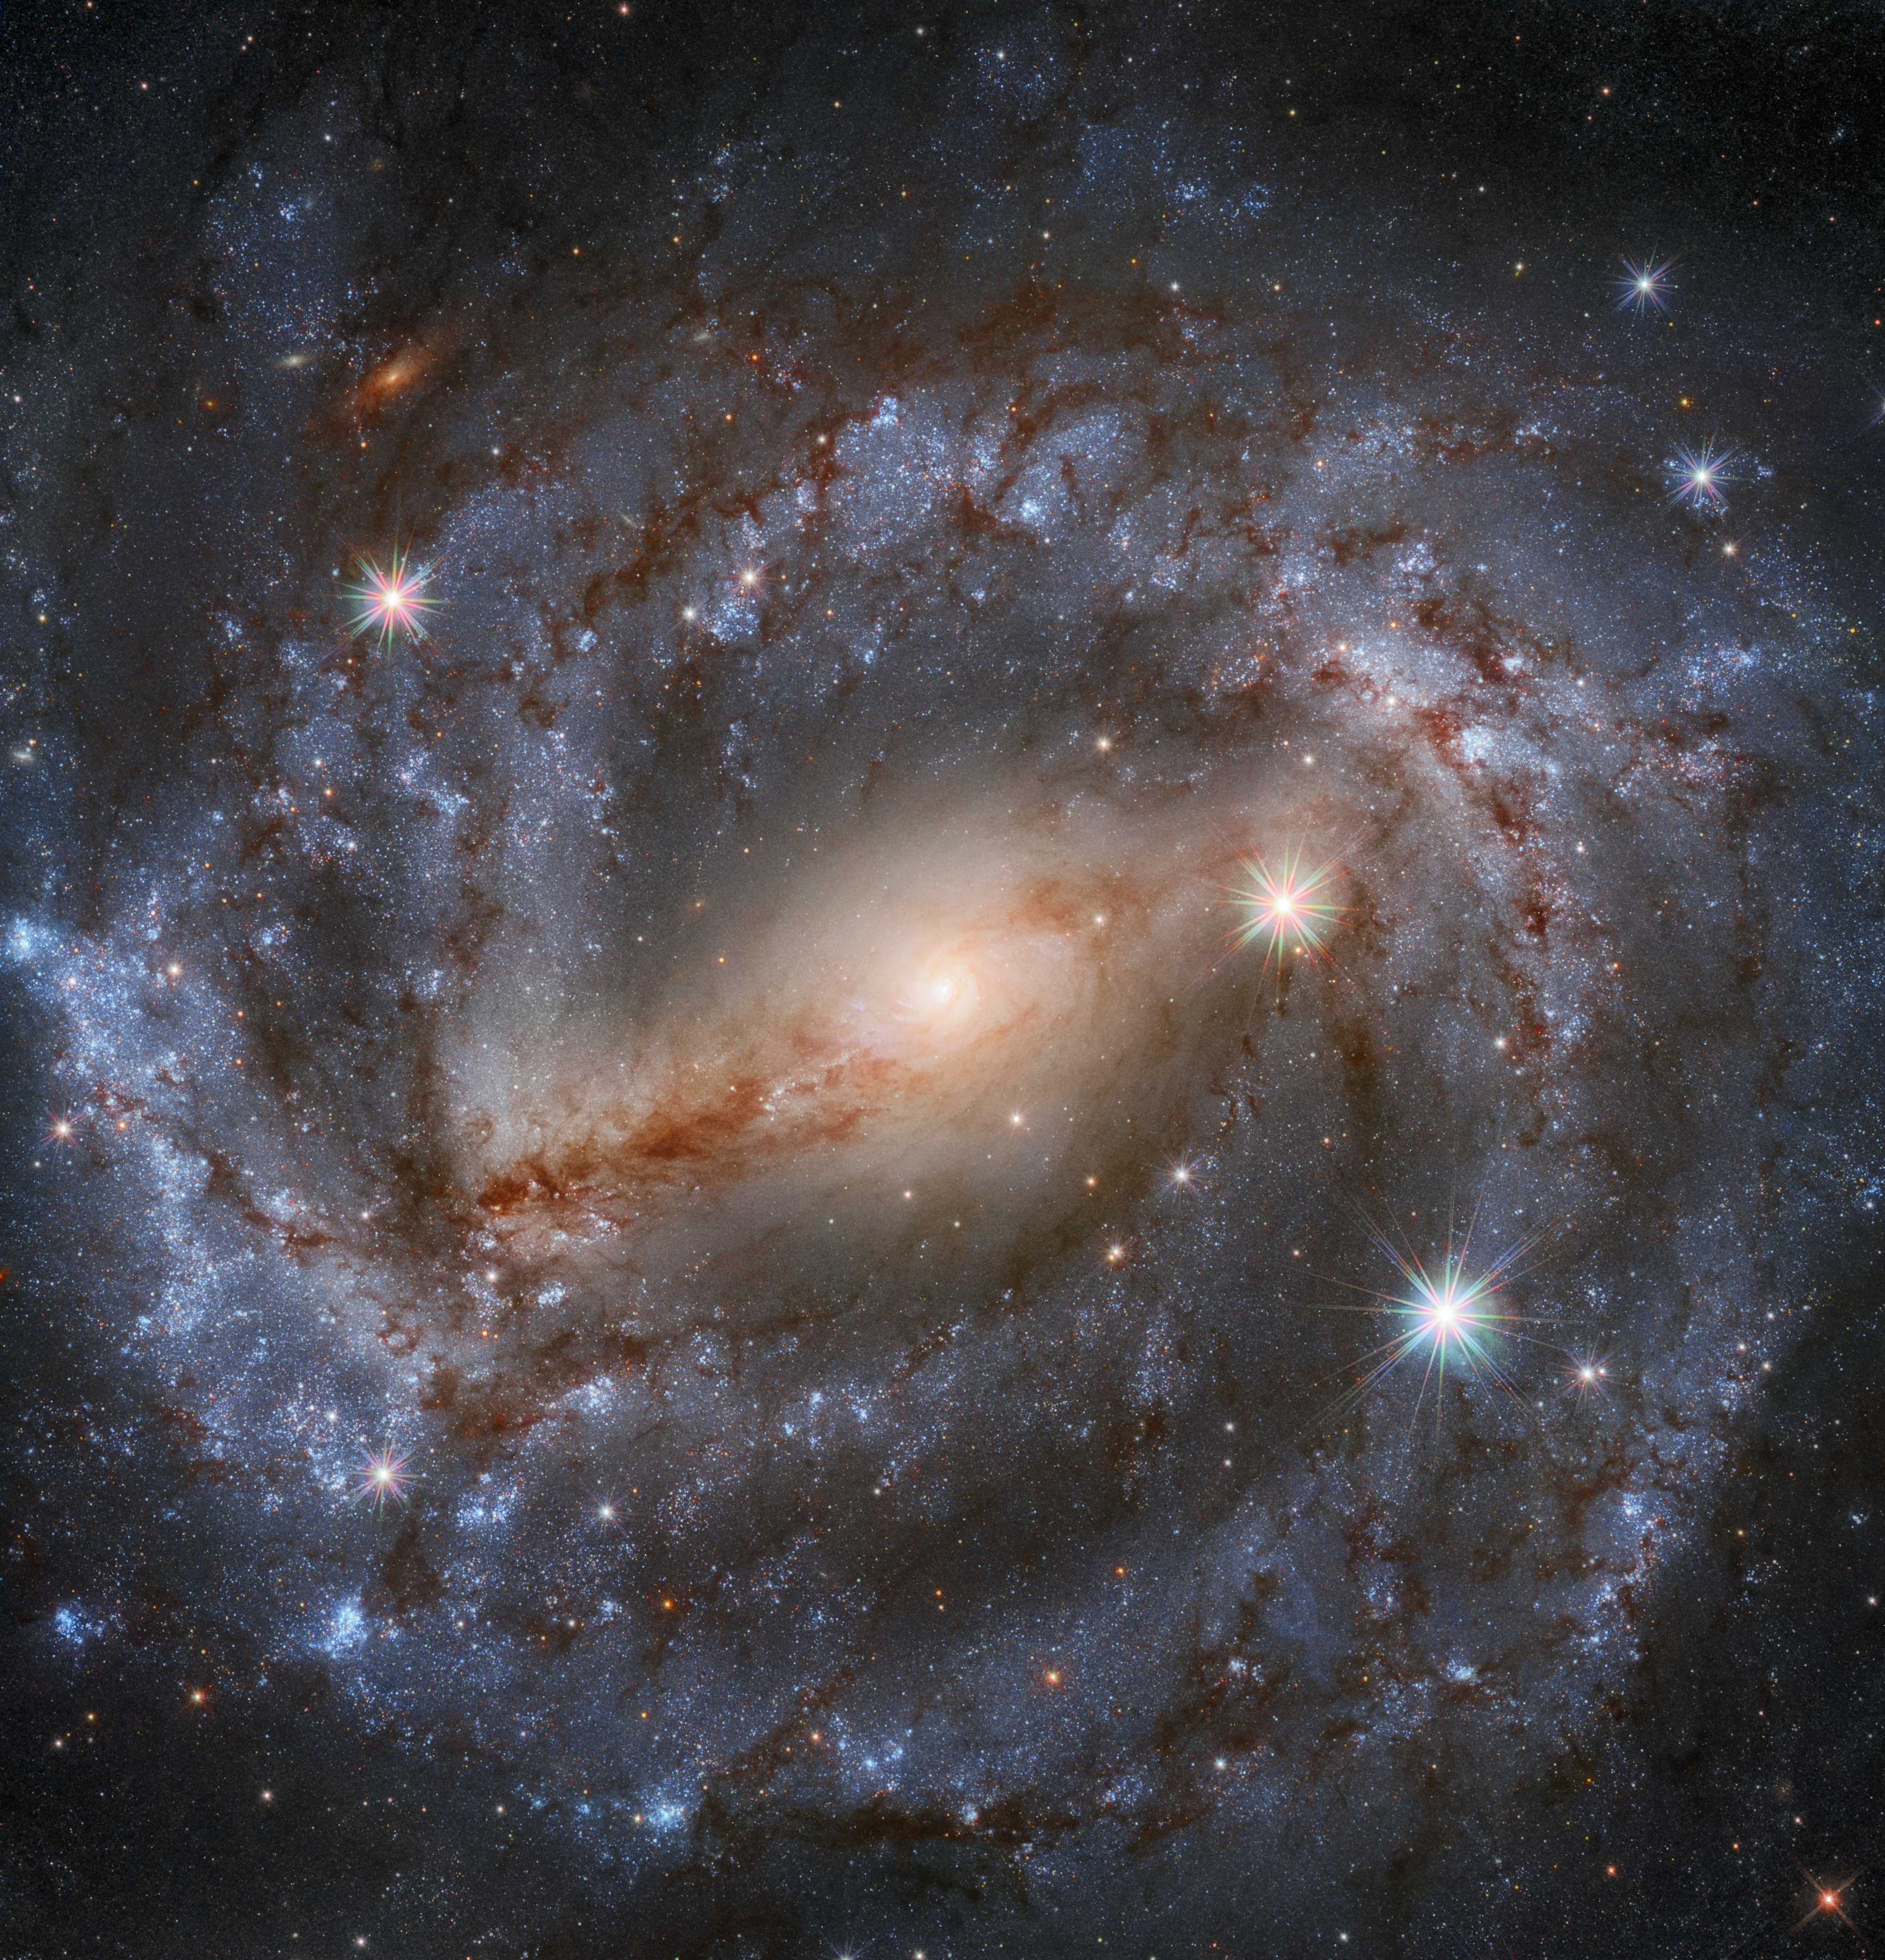

Spirals Are In This Season

This stunning image by the NASA/ESA Hubble Space Telescope features the spiral galaxy NGC 5643 in the constellation of Lupus (The Wolf). Looking this good isn’t easy; thirty different exposures, for a total of 9 hours observation time, together with the high resolution and clarity of Hubble, were needed to produce an image of such high level of detail and of beauty.

NGC 5643 is about 60 million light-years away from Earth and has been the host of a recent supernova event (not visible in this latest image). This supernova (2017cbv) was a specific type in which a white dwarf steals so much mass from a companion star that it becomes unstable and explodes. The explosion releases significant amounts of energy and lights up that part of the galaxy.

The observation was proposed by Adam Riess, who was awarded a Nobel Laureate in physics 2011 for his contributions to the discovery of the accelerating expansion of the Universe, alongside Saul Perlmutter and Brian Schmidt.

Credit: ESA/Hubble & NASA, A. Riess et al. Acknowledgement: Mahdi Zamani